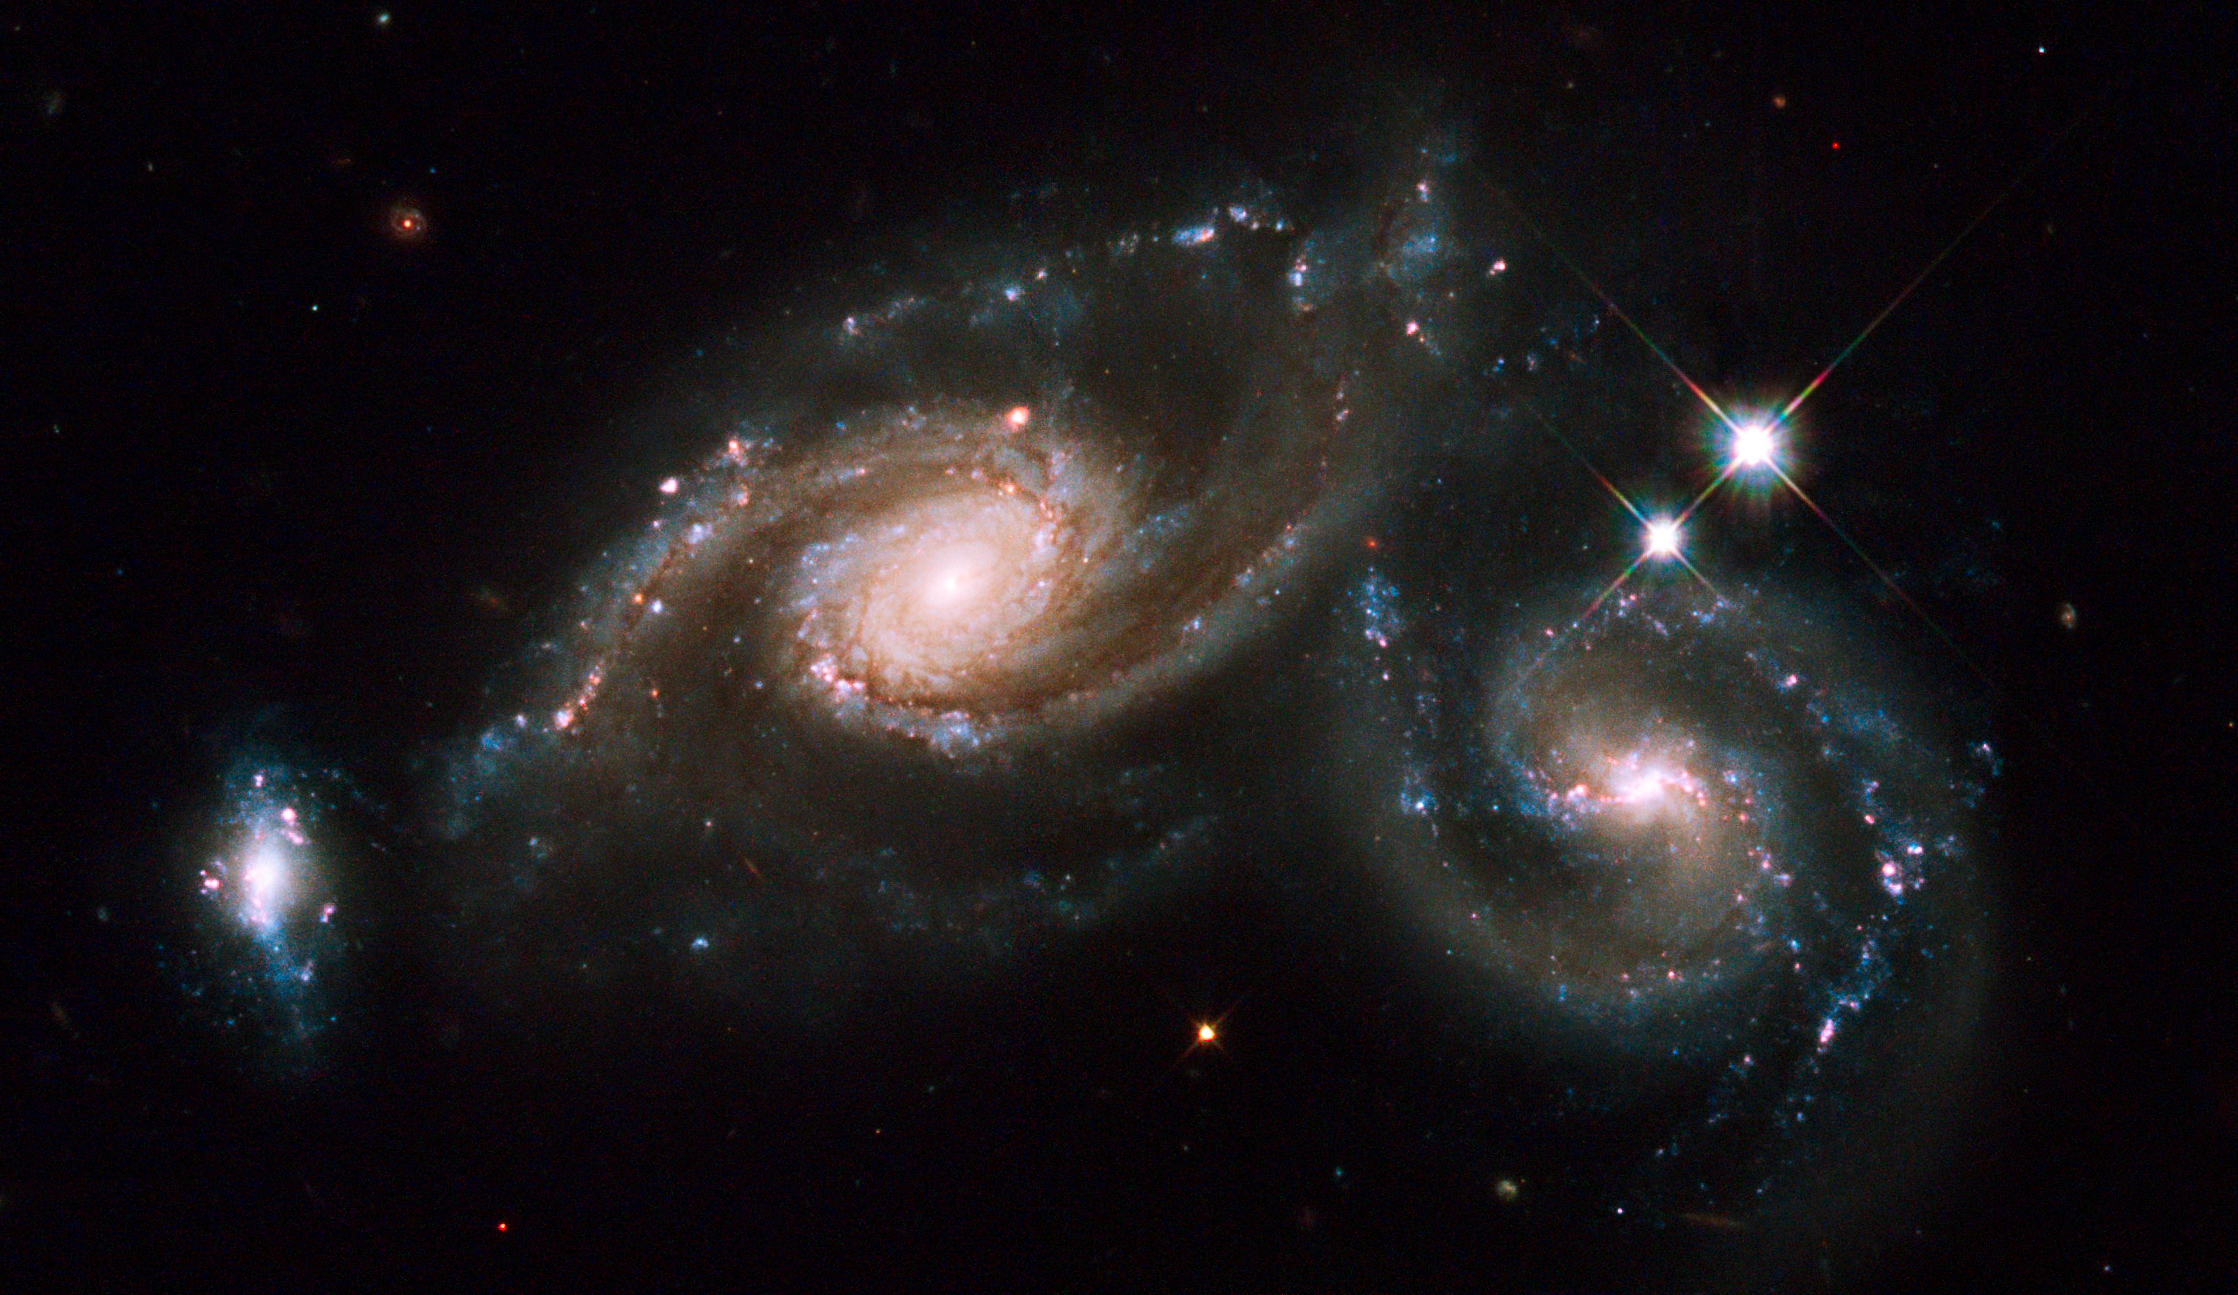

Hubble celebrates the International Year of Astronomy 2009 with the galaxy triplet Arp 274

In celebration of the International Year of Astronomy 2009, the NASA/ESA Hubble Space Telescope photographed the winning target in the Space Telescope Science Institute's "You Decide" competition. The image of the winner, a group of interacting galaxies called Arp 274, was revealed during ESO's "Around the World in 80 Telescopes" webcast. The striking object received 67,021 votes out of the nearly 140,000 votes cast for the six candidate targets.

On 1-2 April Hubble's Wide Field Planetary Camera 2 captured Arp 274 (also known as NGC 5679). Arp 274 is a system of three galaxies that appear to be partially overlapping in the image, although they may be at somewhat different distances. The spiral shapes of two of these galaxies appear mostly intact. The third galaxy (far left) is more compact, but shows evidence of star formation.

Two of the three galaxies are forming new stars at a high rate. This is evident in the bright blue knots of star formation that are strung along the arms of the galaxy on the right and along the small galaxy on the left.

The largest component is located in the middle of the three. It appears as a spiral galaxy, which may be barred. The entire system resides at about 400 million light-years away from Earth in the constellation Virgo.

Hubble's Wide Field Planetary Camera 2 was used to image Arp 274. Blue, yellow and infrared filters were combined with a filter that isolates hydrogen emission. The colours in this image reflect the intrinsic colour of the different stellar populations that make up the galaxies. Yellowish older stars can be seen in the central bulge of each galaxy. A bright central cluster of stars pinpoint each nucleus. Younger blue stars trace the spiral arms, along with pinkish nebulae that are illuminated by new star formation. Interstellar dust is silhouetted against the starry population. The pair of foreground stars on the right are inside our own Milky Way.

The International Year of Astronomy 2009 is the celebration of the 400th anniversary of Galileo's first observations with a telescope. People around the world are coming together to participate in the IYA's 100 Hours of Astronomy, 2 April to 5 April. This global astronomy event is geared toward encouraging as many people as possible to experience the night sky.

Credit: NASA, ESA and M. Livio and the Hubble Heritage Team (STScI/AURA)

STScI is an International Year of Astronomy 2009 programme partner. The IYA2009 secretariat is located at ESO headquarters in Garching, Germany.

Credit: NASA & ESA